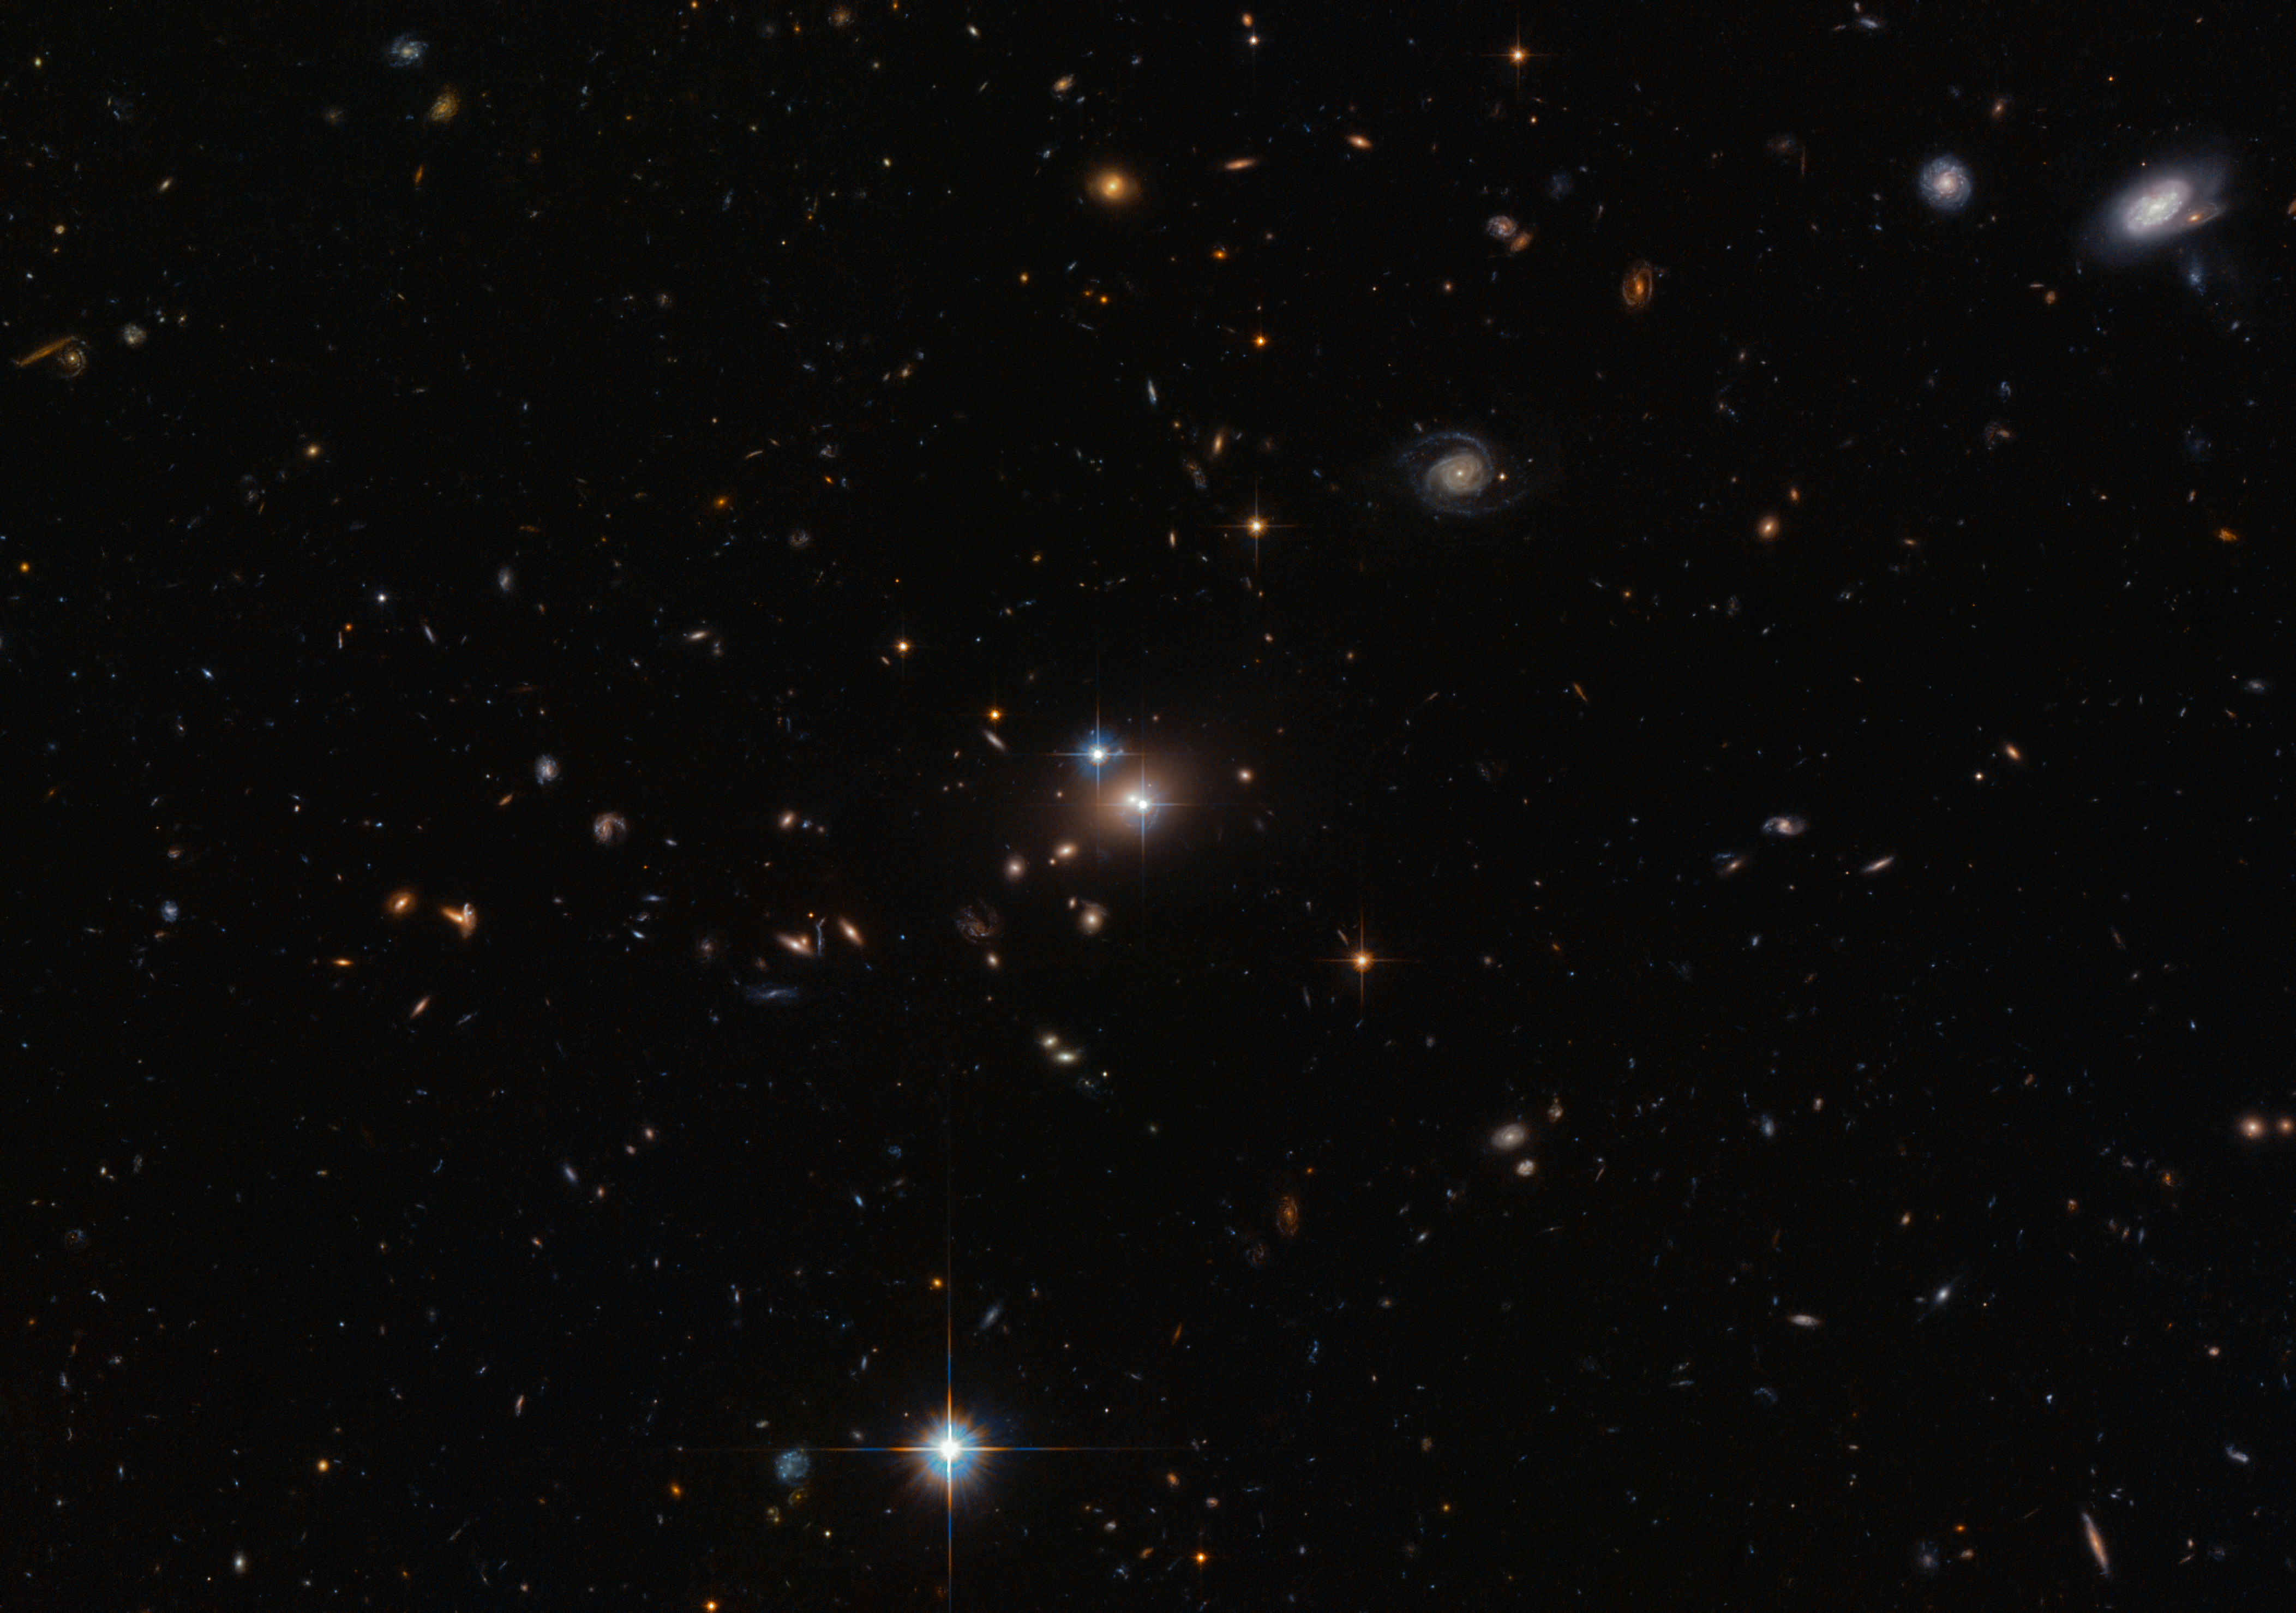

Seeing double

In this new Hubble image two objects are clearly visible, shining brightly. When they were first discovered in 1979, they were thought to be separate objects — however, astronomers soon realised that these twins are a little too identical! They are close together, lie at the same distance from us, and have surprisingly similar properties. The reason they are so similar is not some bizarre coincidence; they are in fact the same object.

These cosmic doppelgangers make up a double quasar known as QSO 0957+561, also known as the "Twin Quasar", which lies just under 14 billion light-years from Earth. Quasars are the intensely powerful centres of distant galaxies. So, why are we seeing this quasar twice?

Some 4 billion light-years from Earth — and directly in our line of sight — is the huge galaxy YGKOW G1. This galaxy was the first ever observed gravitational lens, an object with a mass so great that it can bend the light from objects lying behind it. This phenomenon not only allows us to see objects that would otherwise be too remote, in cases like this it also allows us to see them twice over.

Along with the cluster of galaxies in which it resides, YGKOW G1 exerts an enormous gravitational force. This doesn't just affect the galaxy's shape, the stars that it forms, and the objects around it — it affects the very space it sits in, warping and bending the environment and producing bizarre effects, such as this quasar double image.

This observation of gravitational lensing, the first of its kind, meant more than just the discovery of an impressive optical illusion allowing telescopes like Hubble to effectively see behind an intervening galaxy. It was evidence for Einstein's theory of general relativity. This theory had identified gravitational lensing as one of its only observable effects, but until this observation no such lensing had been observed since the idea was first mooted in 1936.

Credit: ESA/Hubble & NASA